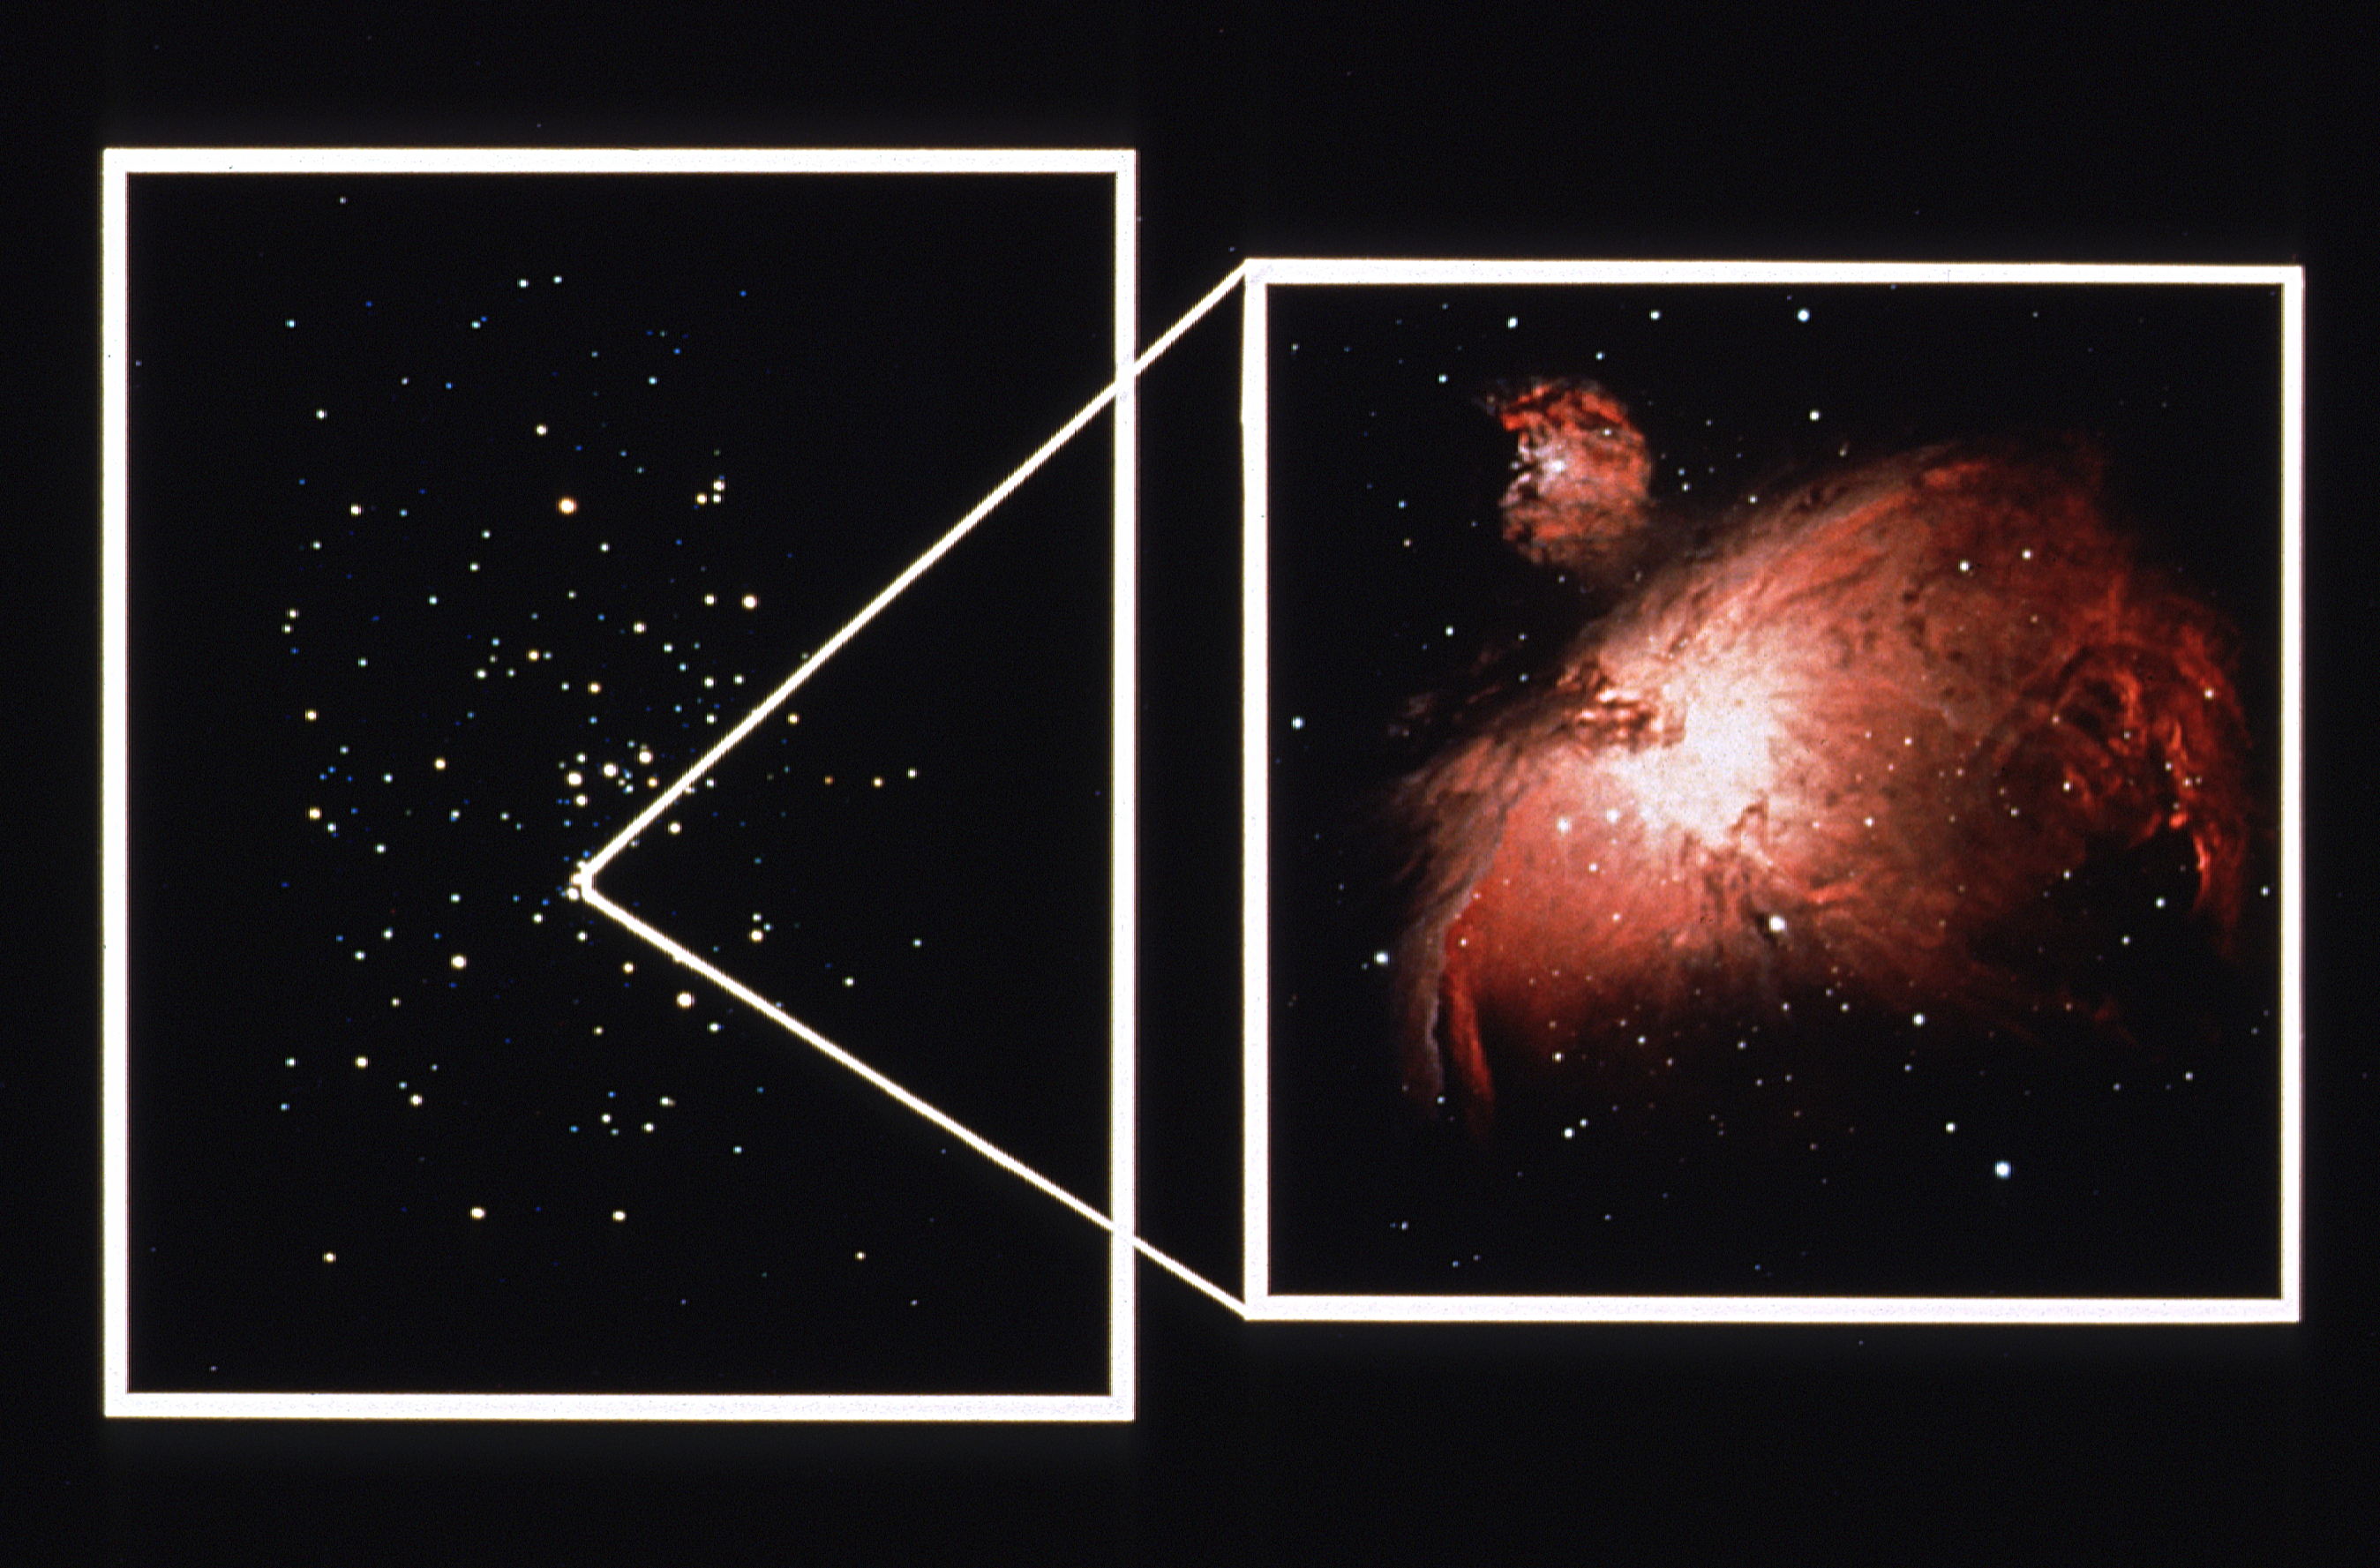

Orion Nebula montage

Constellation of Orion and ground-based image of Orion Nebula.

Credit: NASA/ESA